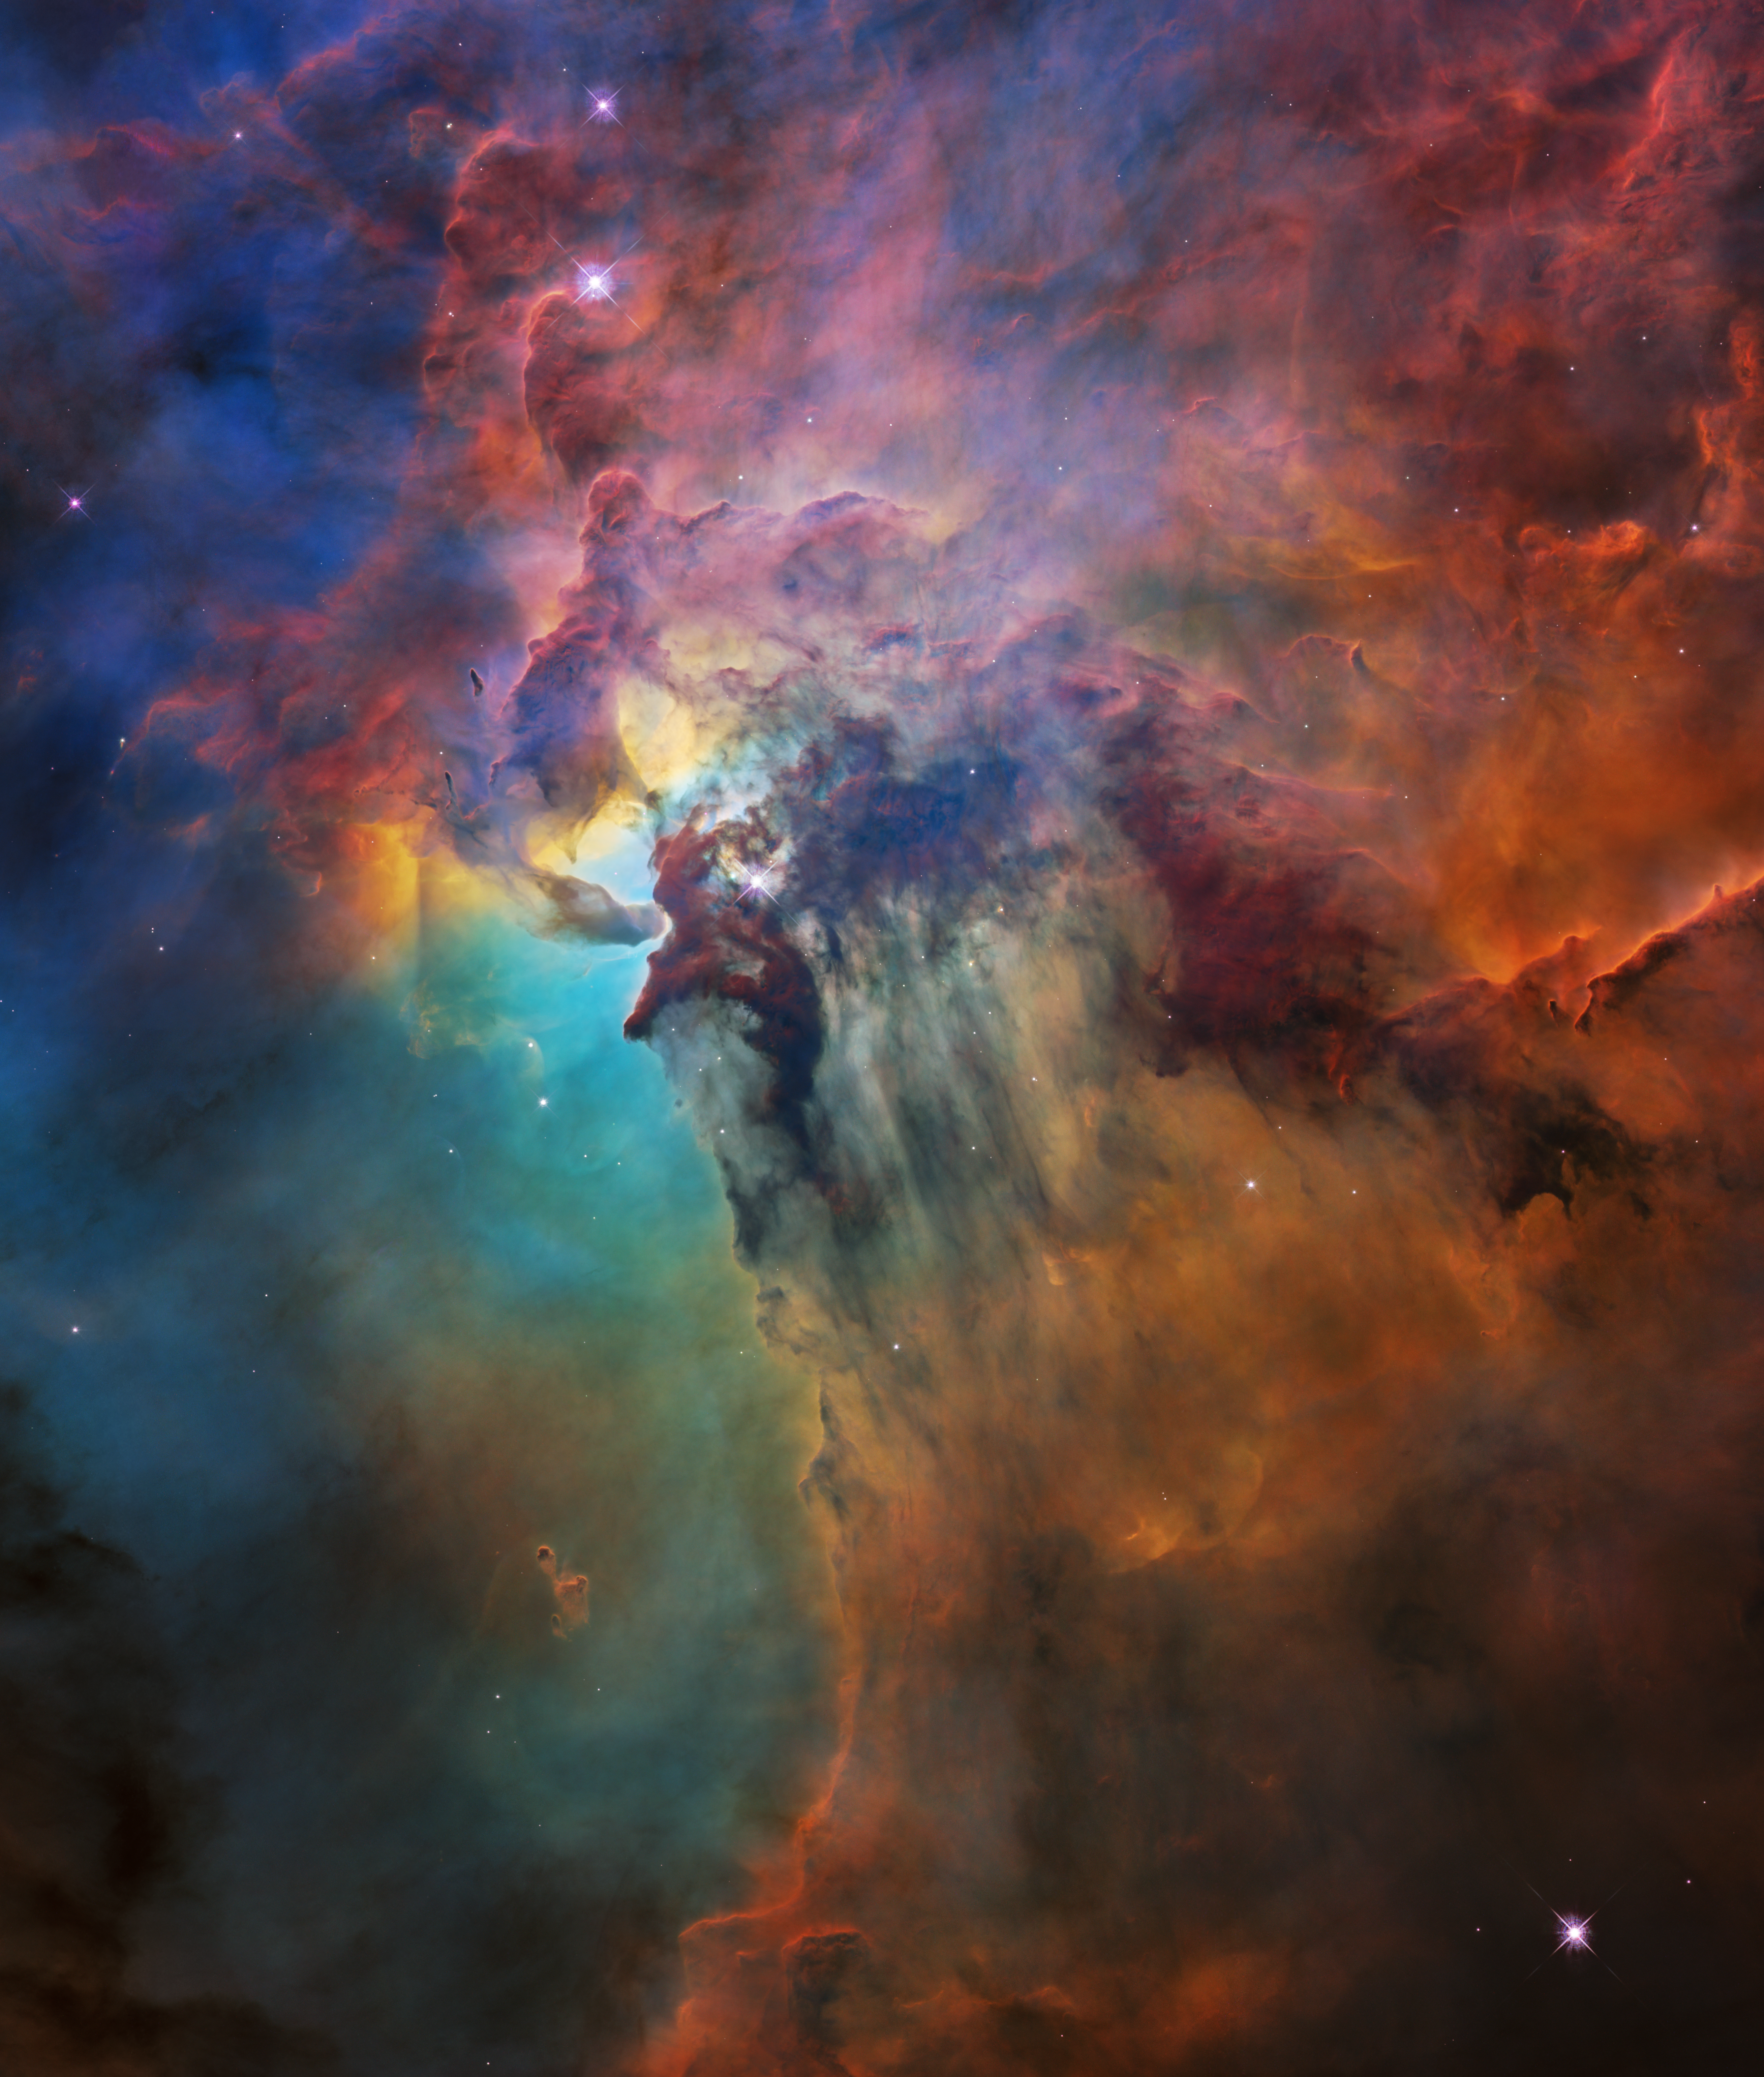

Hubble's 28th birthday picture: The Lagoon Nebula (Uncropped image)

To celebrate its 28th anniversary in space the NASA/ESA Hubble Space Telescope took this amazing and colourful image of the Lagoon Nebula. The whole nebula, about 4000 light-years away, is an incredible 55 light-years wide and 20 light-years tall. This image shows only a small part of this turbulent star-formation region, about four light-years across.

This stunning nebula was first catalogued in 1654 by the Italian astronomer Giovanni Battista Hodierna, who sought to record nebulous objects in the night sky so they would not be mistaken for comets. Since Hodierna’s observations, the Lagoon Nebula has been photographed and analysed by many telescopes and astronomers all over the world.

The observations were taken by Hubble’s Wide Field Camera 3 between 12 February and 18 February 2018.

Credit: NASA, ESA, STScI